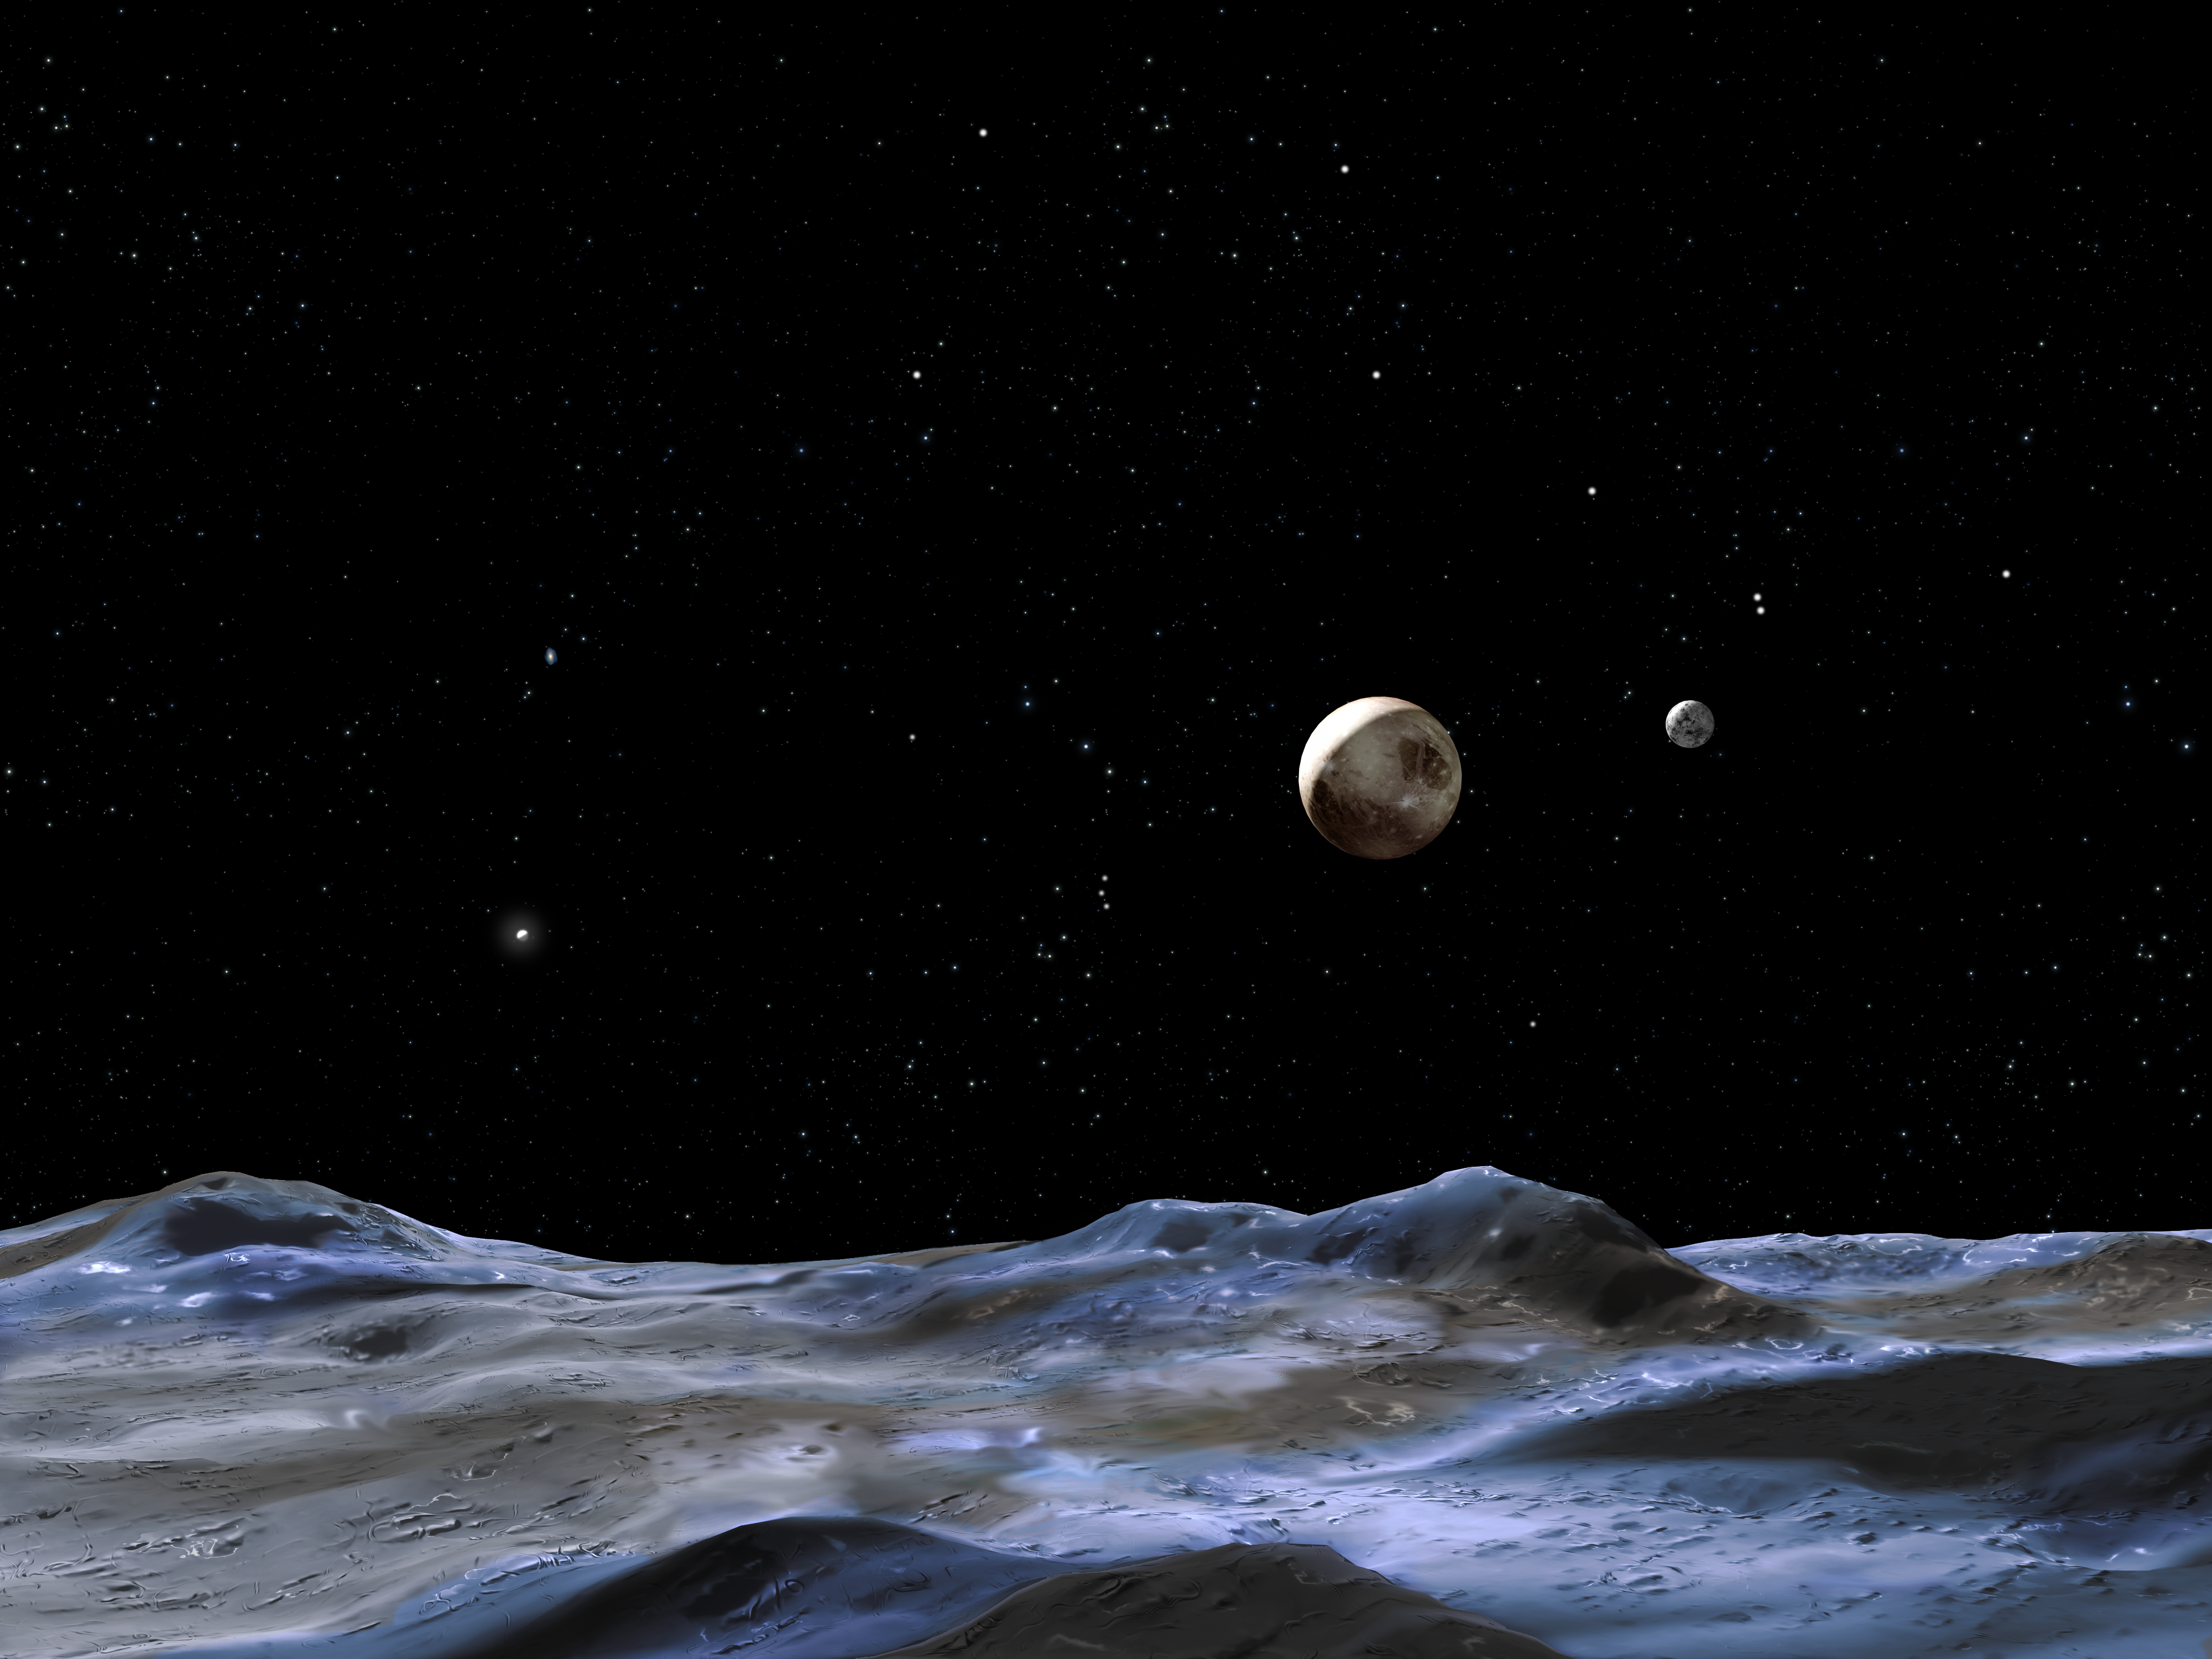

An artist's view of the Pluto system

This illustration shows the Pluto system from the surface of one of the candidate moons. The other members of the Pluto system are just above the putative moon's surface. Pluto is the large disk at center, right. Charon, the system's only confirmed moon, is the smaller disk to the right of Pluto. The other candidate moon is the bright dot on Pluto's far left.

Credit: NASA, ESA and G. Bacon (STScI)